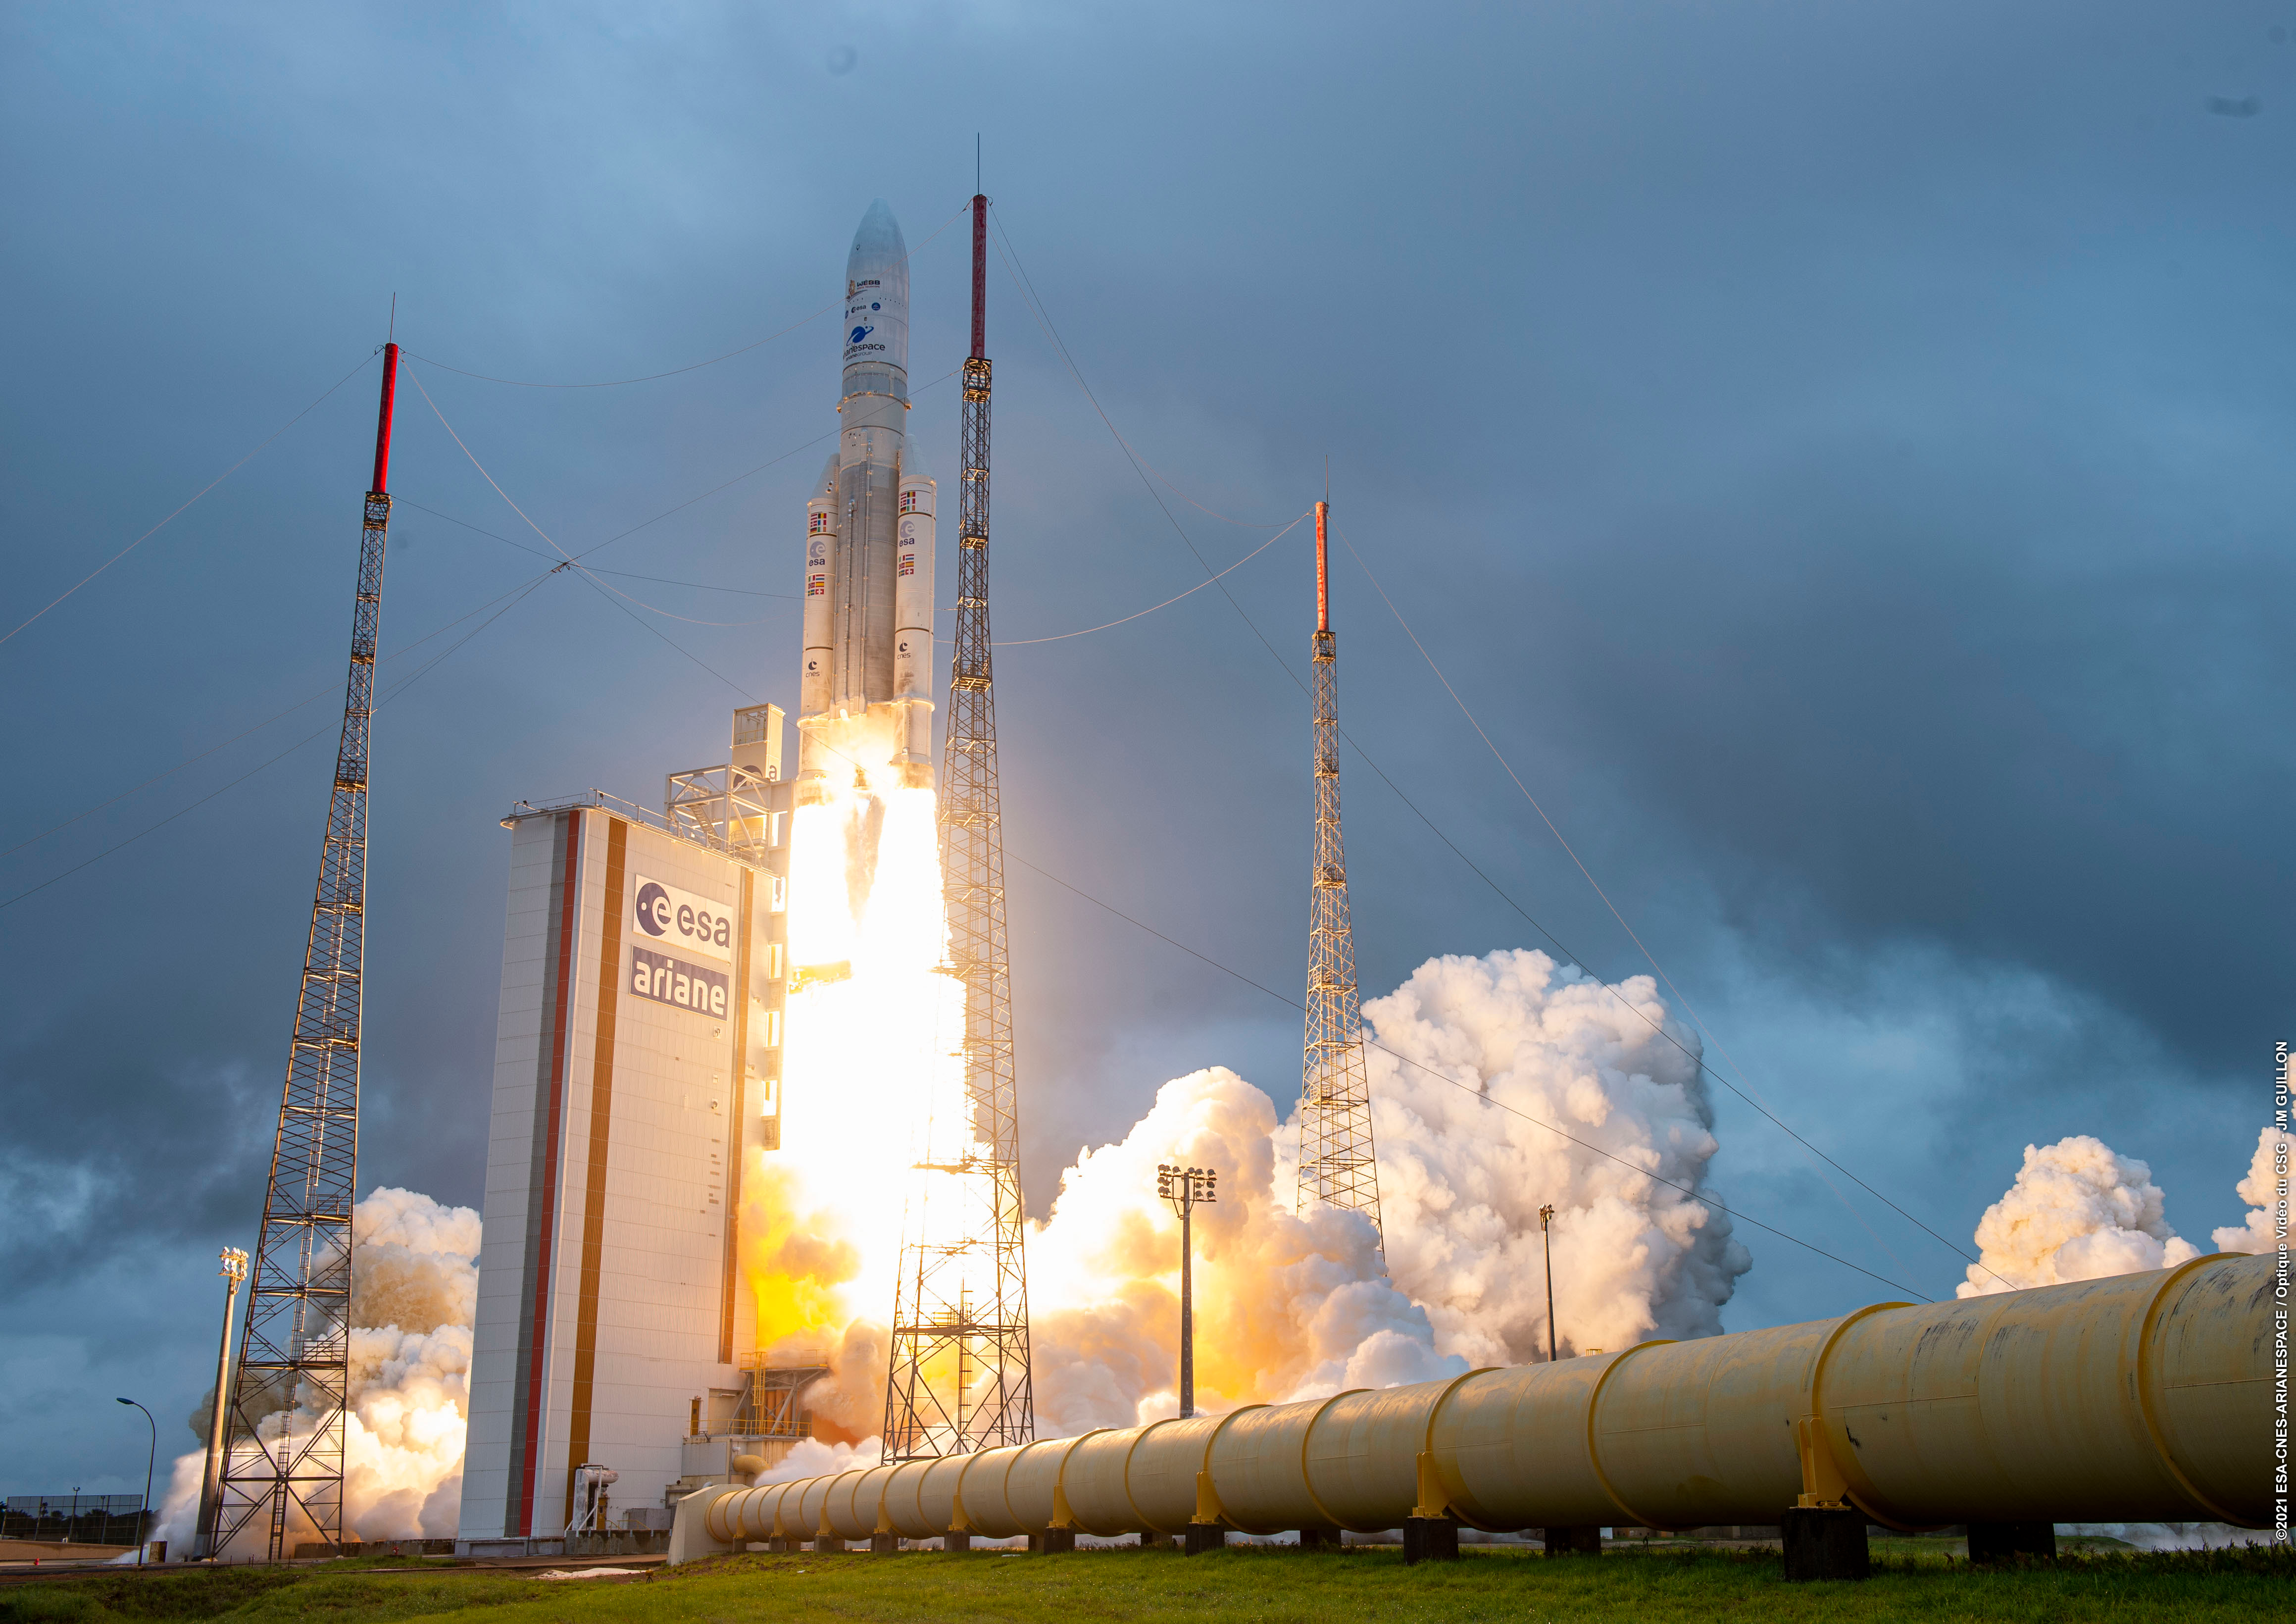

Webb Liftoff on Ariane 5

The NASA/ESA/CSA James Webb Space Telescope lifted off on an Ariane 5 rocket from Europe’s Spaceport in French Guiana, at 13:20 CET on 25 December on its exciting mission to unlock the secrets of the Universe.

Following launch and separation from the rocket, Webb’s mission operations centre in Baltimore, USA confirmed Webb deployed its solar array and is in good condition, marking the launch a success.

In the coming month, Webb, an international partnership between NASA, ESA and the Canadian Space Agency (CSA), will travel to its destination: the second Lagrange point (L2), where it will study the Universe in infrared.

Credit: ESA/CNES/Arianespace/Optique Vidéo du CSG - JM Guillon